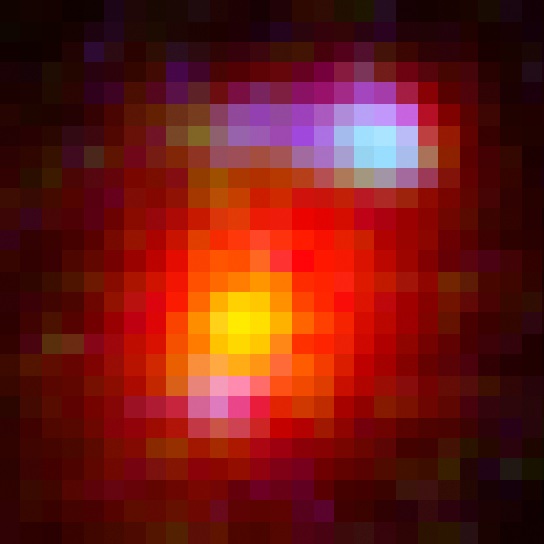

IRC 0218 lensing feature

This NASA/ESA Hubble Space Telescope image reveals a close up view of the most distant cosmic lens yet found, a massive elliptical galaxy whose powerful gravity is magnifying the light from a faraway galaxy behind it.

The giant elliptical is the red object in the centre. The galaxy is seen as it appeared 9.6 billion years ago and is one of the brightest members in a distant cluster of galaxies, called IRC 0218.

The lighter-coloured blobs in the upper right and lower left are the distorted and magnified shapes of a more distant spiral galaxy behind the foreground elliptical. The giant elliptical is so massive that its enormous gravitational field deflects light passing through it, much as an optical lens bends light to form an image. This phenomenon, called gravitational lensing, magnifies, brightens, and distorts images from faraway objects that might otherwise be too faint to observe even with the largest telescopes.

Credit: NASA, ESA, K.-V. Tran (Texas A&M University), and K. Wong (Academia Sinica Institute of Astronomy & Astrophysics)